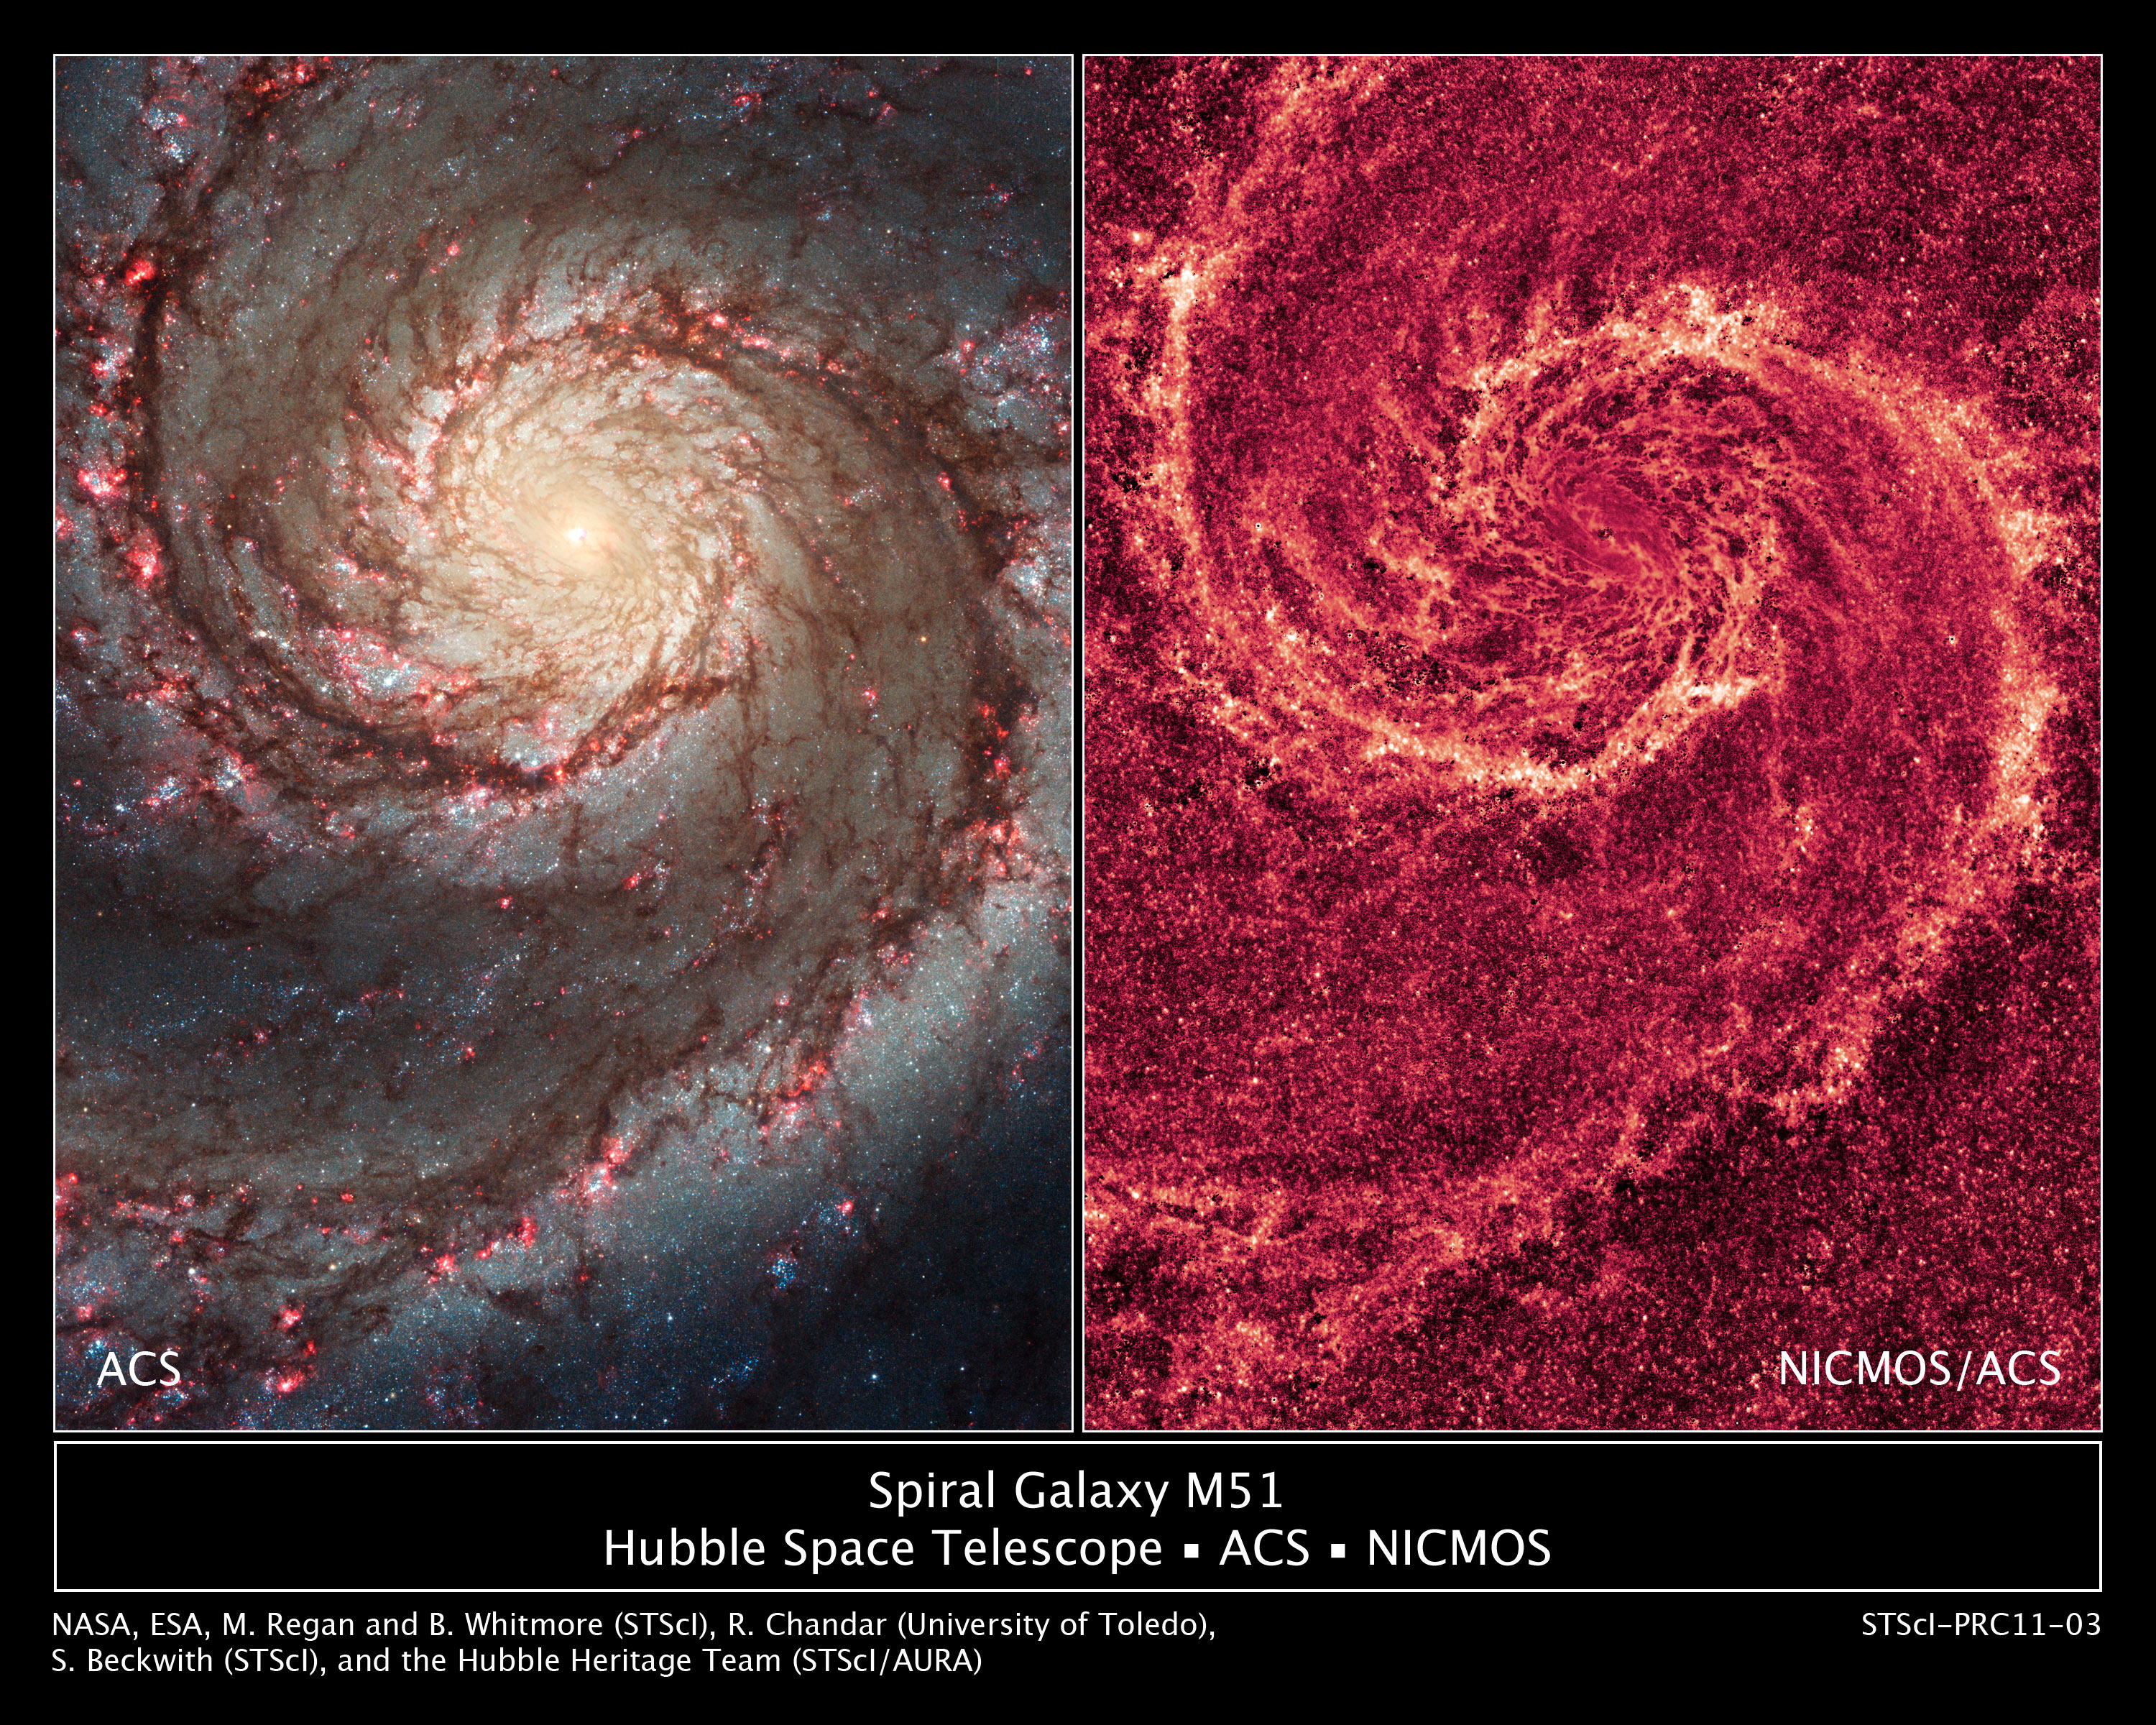

The two-faced Whirlpool Galaxy

These images by the NASA/ESA Hubble Space Telescope show off two dramatically different face-on views of the spiral galaxy M51, dubbed the Whirlpool Galaxy.

The image at left, taken in visible light, highlights the attributes of a typical spiral galaxy, including graceful, curving arms, pink star-forming regions, and brilliant blue strands of star clusters.

In the image at right, most of the starlight has been removed, revealing the Whirlpool's skeletal dust structure, as seen in near-infrared light. This new image is the sharpest view of the dense dust in M51. The narrow lanes of dust revealed by Hubble reflect the galaxy's moniker, the Whirlpool Galaxy, as if they were swirling toward the galaxy's core.

To map the galaxy's dust structure, researchers collected the galaxy's starlight by combining images taken in visible and near-infrared light. The visible-light image captured only some of the light; the rest was obscured by dust. The near-infrared view, however, revealed more starlight because near-infrared light penetrates dust. The researchers then subtracted the total amount of starlight from both images to see the galaxy's dust structure.

The red colour in the near-infrared image traces the dust, which is punctuated by hundreds of tiny clumps of stars, each about 65 light-years wide. These stars have never been seen before. The star clusters cannot be seen in visible light because dense dust enshrouds them. The image reveals details as small as 35 light-years across.

Astronomers expected to see large dust clouds, ranging from about 100 light-years to more than 300 light-years wide. Instead, most of the dust is tied up in smooth and diffuse dust lanes. An encounter with another galaxy may have prevented giant clouds from forming.

Probing a galaxy's dust structure serves as an important diagnostic tool for astronomers, providing invaluable information on how the gas and dust collapse to form stars. Although Hubble is providing incisive views of the internal structure of galaxies such as M51, the planned James Webb Space Telescope (JWST) is expected to produce even crisper images.

Researchers constructed the image by combining visible-light exposures from Jan. 18 to 22, 2005, with the Advanced Camera for Surveys (ACS) and near-infrared–light pictures taken in December 2005 with the Near Infrared Camera and Multi-Object Spectrometer (NICMOS).

Credit for the NICMOS Image: NASA, ESA, M. Regan and B. Whitmore (STScI) and R. Chandar (University of Toledo, USA)
Credit for the ACS Image: NASA, ESA, S. Beckwith (STScI) and the Hubble Heritage Team (STScI/AURA)